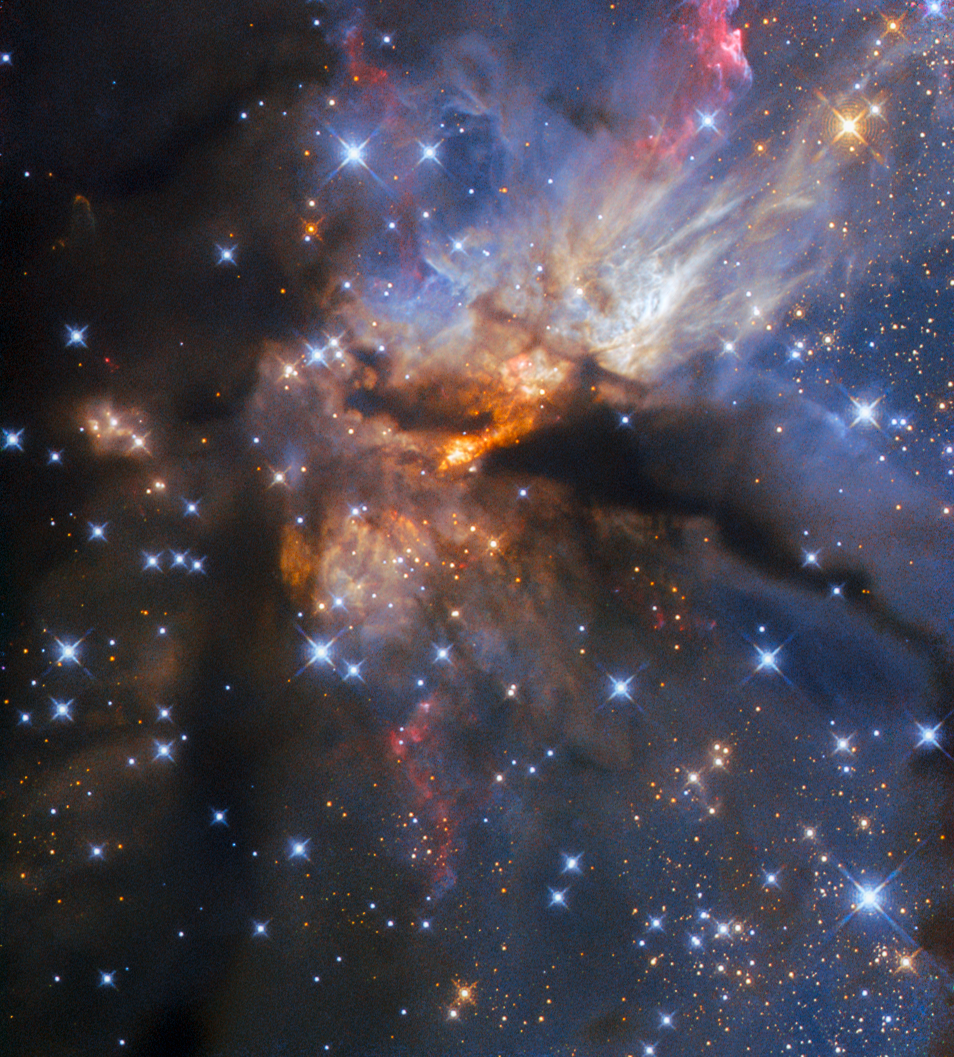

Leaving on a jet

This spectacular image shows a region called G35.2-0.7N, which is known as a hotbed of high-mass star formation. The kind of stars that form here are so massive that they will end their lives as destructive supernovae. However, even as they form they greatly impact their surroundings. At least one B-type star — the second most massive type — lurks within the region pictured here, and a powerful protostellar jet that it is launching towards us is the source of the spectacular light show. The image was taken with the Wide Field Camera 3 (WFC3), which is mounted on the NASA/ESA Hubble Space Telescope, and the region G35.2-0.7N lies around 7200 light-years from Earth in the constellation Aquila.

This beautiful picture was assembled using data that were collected primarily for very specific research purposes, as are many of the Hubble Pictures of the Week. The research conducted using these data included measuring the extent of ionisation in the jets being blasted out of the protostar buried within G35.2-0.7N. Ionisation is a process by which atoms or molecules become charged, often because they are in such a high-energy environment that they have lost some of their electrons (the tiny negatively charged particles that orbit nuclei in atoms and molecules). Protostellar jets are enormous collimated beams of matter that are ejected from protostars. Collimated simply means that the matter is ejected in parallel (column-like) streams, which in turn means that the jets do not spread out much, but extend out very far in relatively straight lines.

The visual result of the ejected matter is the glorious display visible in this image. Much of the nebula is dark, with light being blocked from Hubble’s view by the rich dust clouds that produce these massive stars. Near the very centre can be seen the location of the star and the jet of material it is emitting. The small, bright orange streak there is a cavity in the dust carved out by the ferocity of the jet as it streams towards us. By breaking through its dusty cocoon, the jet reveals light from the protostar, but there is still so much dust that the light is “reddened” to a fiery orange. The massive protostar lies at the very lower-left tip of this cavity.

Credit: ESA/Hubble & NASA, R. Fedriani, J. Tan